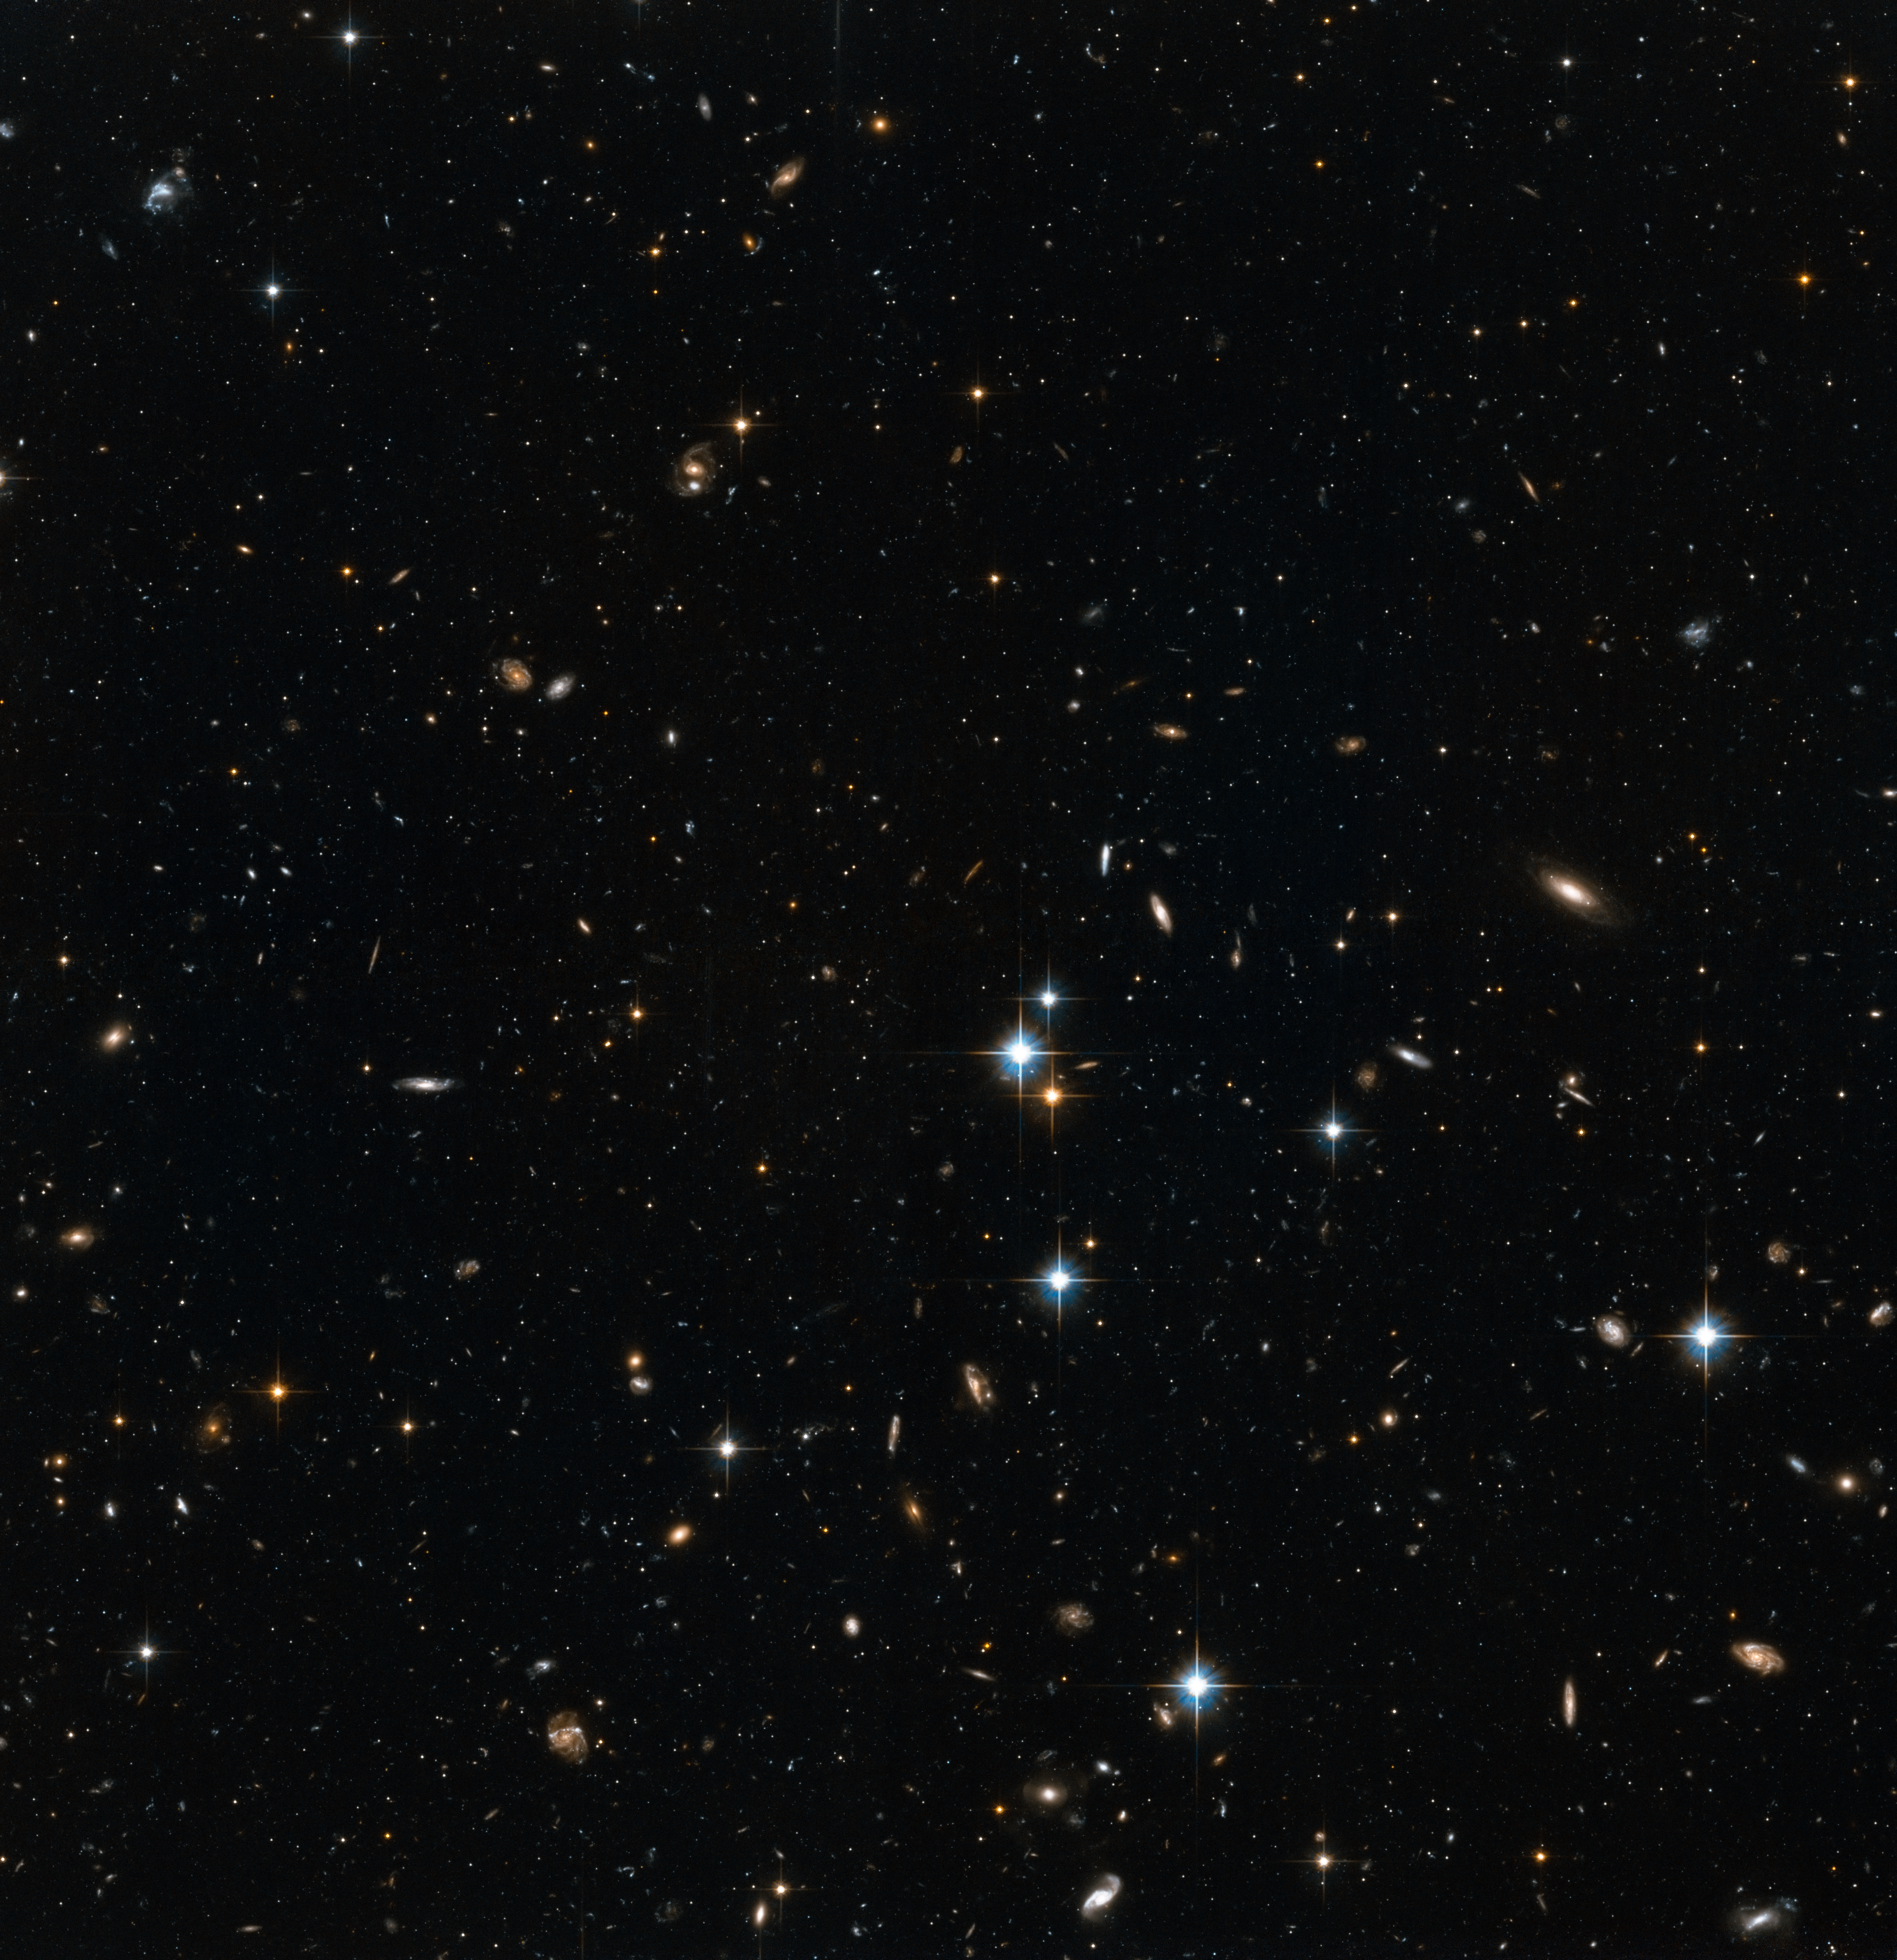

Stars in the Andromeda Galaxy’s halo with background galaxies (1)

This image shows NASA/ESA Hubble Space Telescope images of a small part of the halo of the Andromeda Galaxy. The halo is the huge and sparse sphere of stars that surrounds a galaxy. While there are relatively few stars in a galaxy’s halo, studies of the rotation rate of galaxies suggest that there is a great deal of invisible dark matter here.

Hubble’s position above the distorting effect of the atmosphere, combined with the galaxy’s relative proximity, means that this image can be resolved into individual stars, rather than the cloudy white wisps usually seen in observations of galaxies. In the background, many faraway galaxies are visible, billions of light-years further away than the Andromeda Galaxy.

These observations were made in order to observe a wide variety of stars in Andromeda, ranging from faint main sequence stars like our own Sun, to the much brighter RR Lyrae stars, which are a type of variable star. With these measurements, astronomers can determine the chemistry and ages of the stars in each part of the Andromeda Galaxy.

Credit: NASA, ESA and T.M. Brown (STScI)